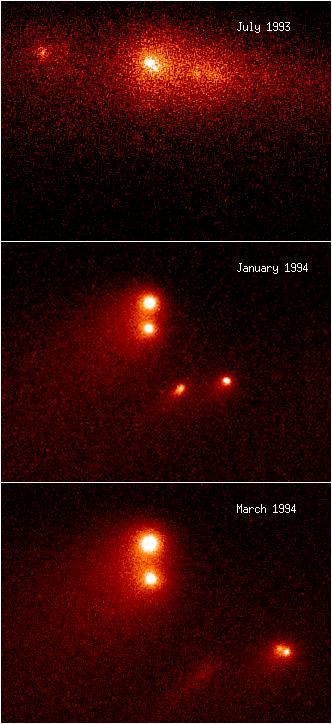

Comet P/Shoemaker-Levy 9 "Gang Of Four"

This is a composite HST image taken in visible light showing thetemporal evolution of the brightest region of comet P/Shoemaker-Levy9. In this false-color representation, different shades of redcolor are used to display different intensities of light.

[top panel] - This shows data taken on 1 July 1993, prior to theHST servicing mission. The separation of the two brightestfragments is only 0.3", so ground-based telescopes could not resolvethis pair. The other two fragments just to the right of theclosely-spaced pair are only barely detectable due to HST'sspherical aberration.

Credit: Dr. Hal Weaver and T. Ed Smith (STScI), and NASA/ESA